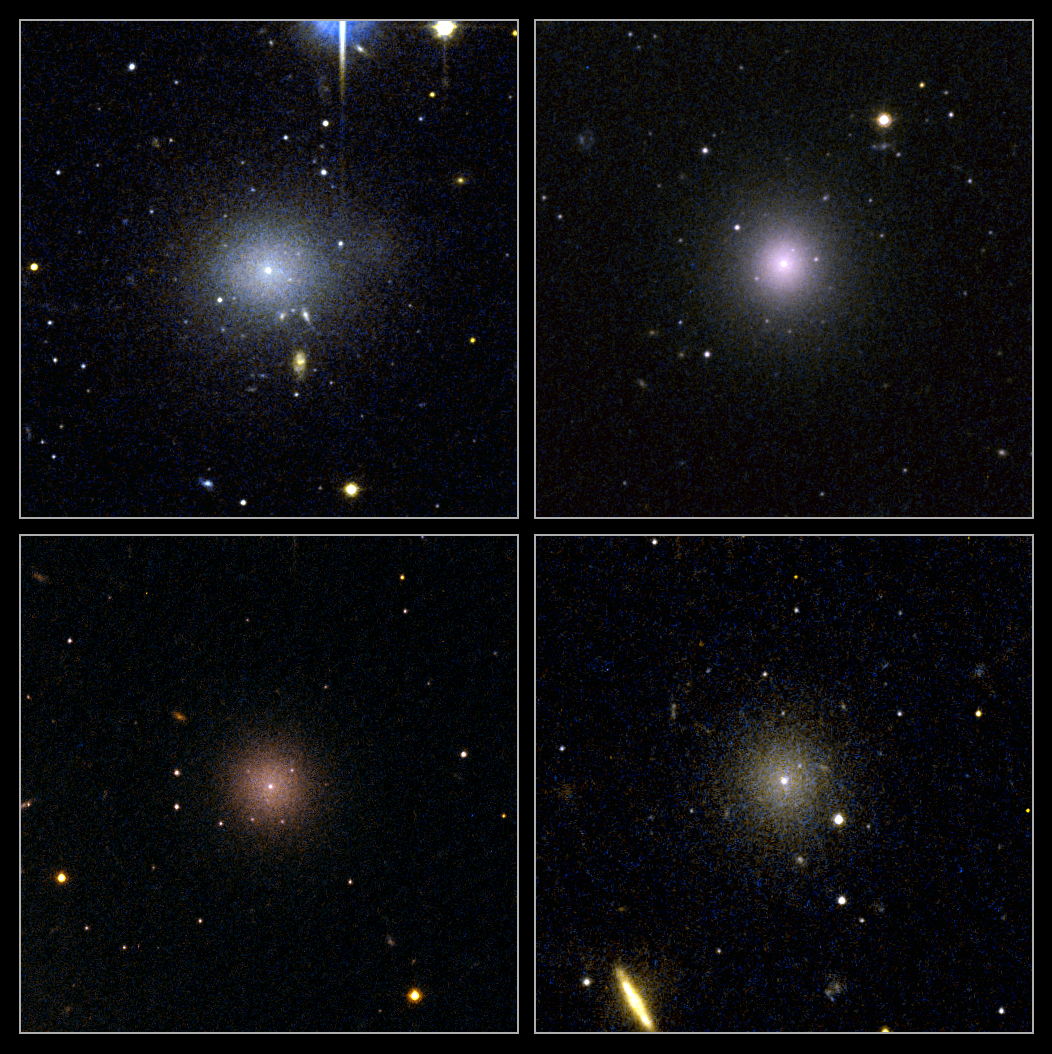

Small galaxies yield clues about dark matter

These four dwarf galaxies are part of a census of small galaxies in the tumultuous heart of the nearby Perseus galaxy cluster.

The galaxies appear smooth and symmetrical, suggesting that they have not been tidally disrupted by the pull of gravity in the dense cluster environment. Larger galaxies around them, however, are being ripped apart by the gravitational tug of other galaxies.

The images, taken by NASA/ESA's Hubble Space Telescope, are evidence that the undisturbed galaxies are enshrouded by a "cushion" of dark matter, which protects them from their rough-and-tumble neighborhood.

Dark matter is an invisible form of matter that accounts for most of the Universe's mass. Astronomers have deduced the existence of dark matter by observing its gravitational influence on normal matter, consisting of stars, gas, and dust.

Observations by Hubble's Advanced Camera for Surveys spotted 29 dwarf elliptical galaxies in the Perseus Cluster, located 250 million light-years away and one of the closest galaxy clusters to Earth. Of those galaxies, 17 are new discoveries.

The images were taken in 2005.

Credit: NASA, ESA and C. Conselice (University of Nottingham, U.K.)